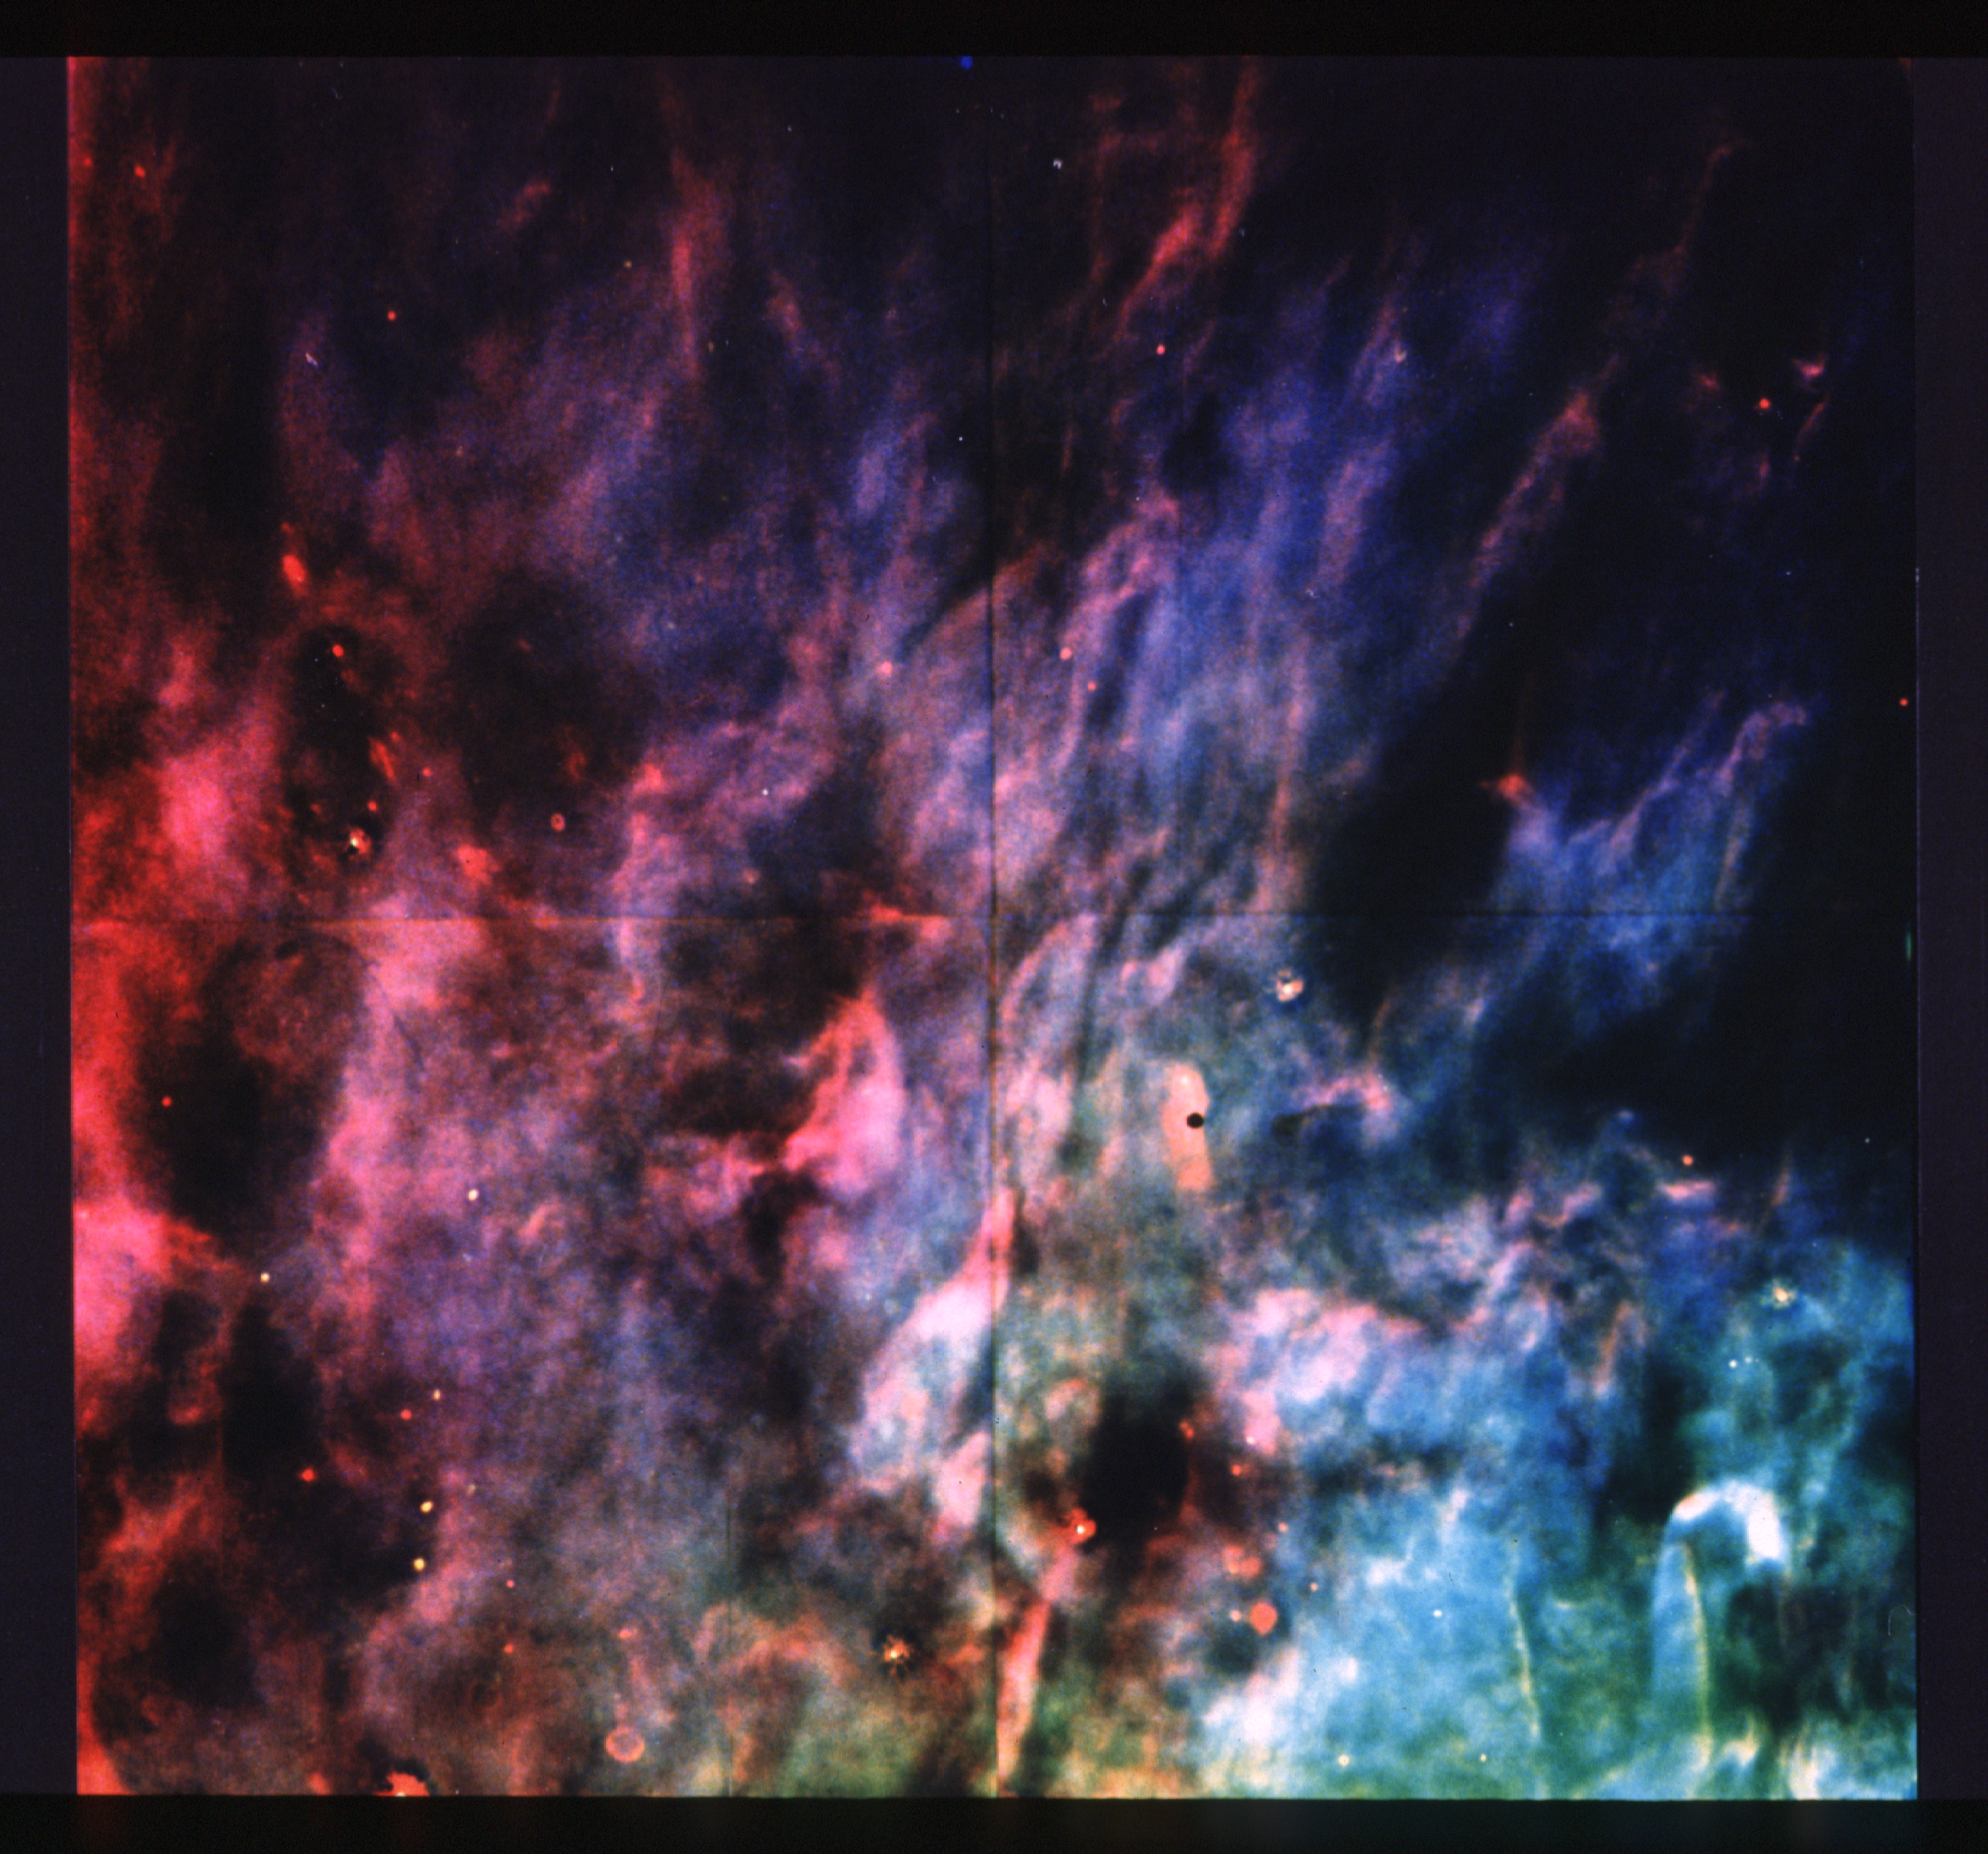

Window-curtain structure of the Orion Nebula revealed

Recent images made with the Wide Field Camera on NASA/ESA Hubble Space Telescope have revealed the structure of a thin sheet of gas located at the edge of the famous "Great Nebula" in Orion, an estimated 1500 light years from Earth. Astronomers, who compare the appearance of this sheet of gas with that of a rippled window curtain, report that this emission traces the boundary between the hot, diffuse interior of the nebula and an adjacent dense cool cloud. The sheet is seen in light emitted by atoms of gaseous sulfur (shown in red in the photograph). This emission is strongest under conditions which are intermediate between those in the interior of nebula and those in the dense cloud. The sulfur emission is seen to break into filamentary and clumpy structures with sizes down to the limit of what the telescope can show. In contrast, emission from gaseous oxygen and hydrogen (shown as blue and green, respectively) is favored in the interior of the nebula itself, and is distributed much more smoothly in the image. The Orion Nebula is a "stellar nursery" - a region where new stars are forming out of interstellar gas. The emission from the nebula is powered by the intense ultraviolet light from a cluster of particularly hot and luminous stars. The sulfur emission seen in the photograph is coming from the region where the light from these stars is "boiling off" material from the face of the dense cloud. This is the very cloud from which the hot stars formed, and is known to harbor additional ongoing star formation. Astronomers say that this is a good example of a case where, despite the spherical aberration that has hobbled many of the scientific programs which the Hubble Space Telescope was expected to carry out, the telescope can still be used to obtain scientifically interesting data with clarity far exceeding that normally possible from the ground. The Wide Field/Planetary Camera was designed and built by the Jet Propulsion Laboratory, which is operated by the California Institute of Technology.

Credit: NASA/ESA